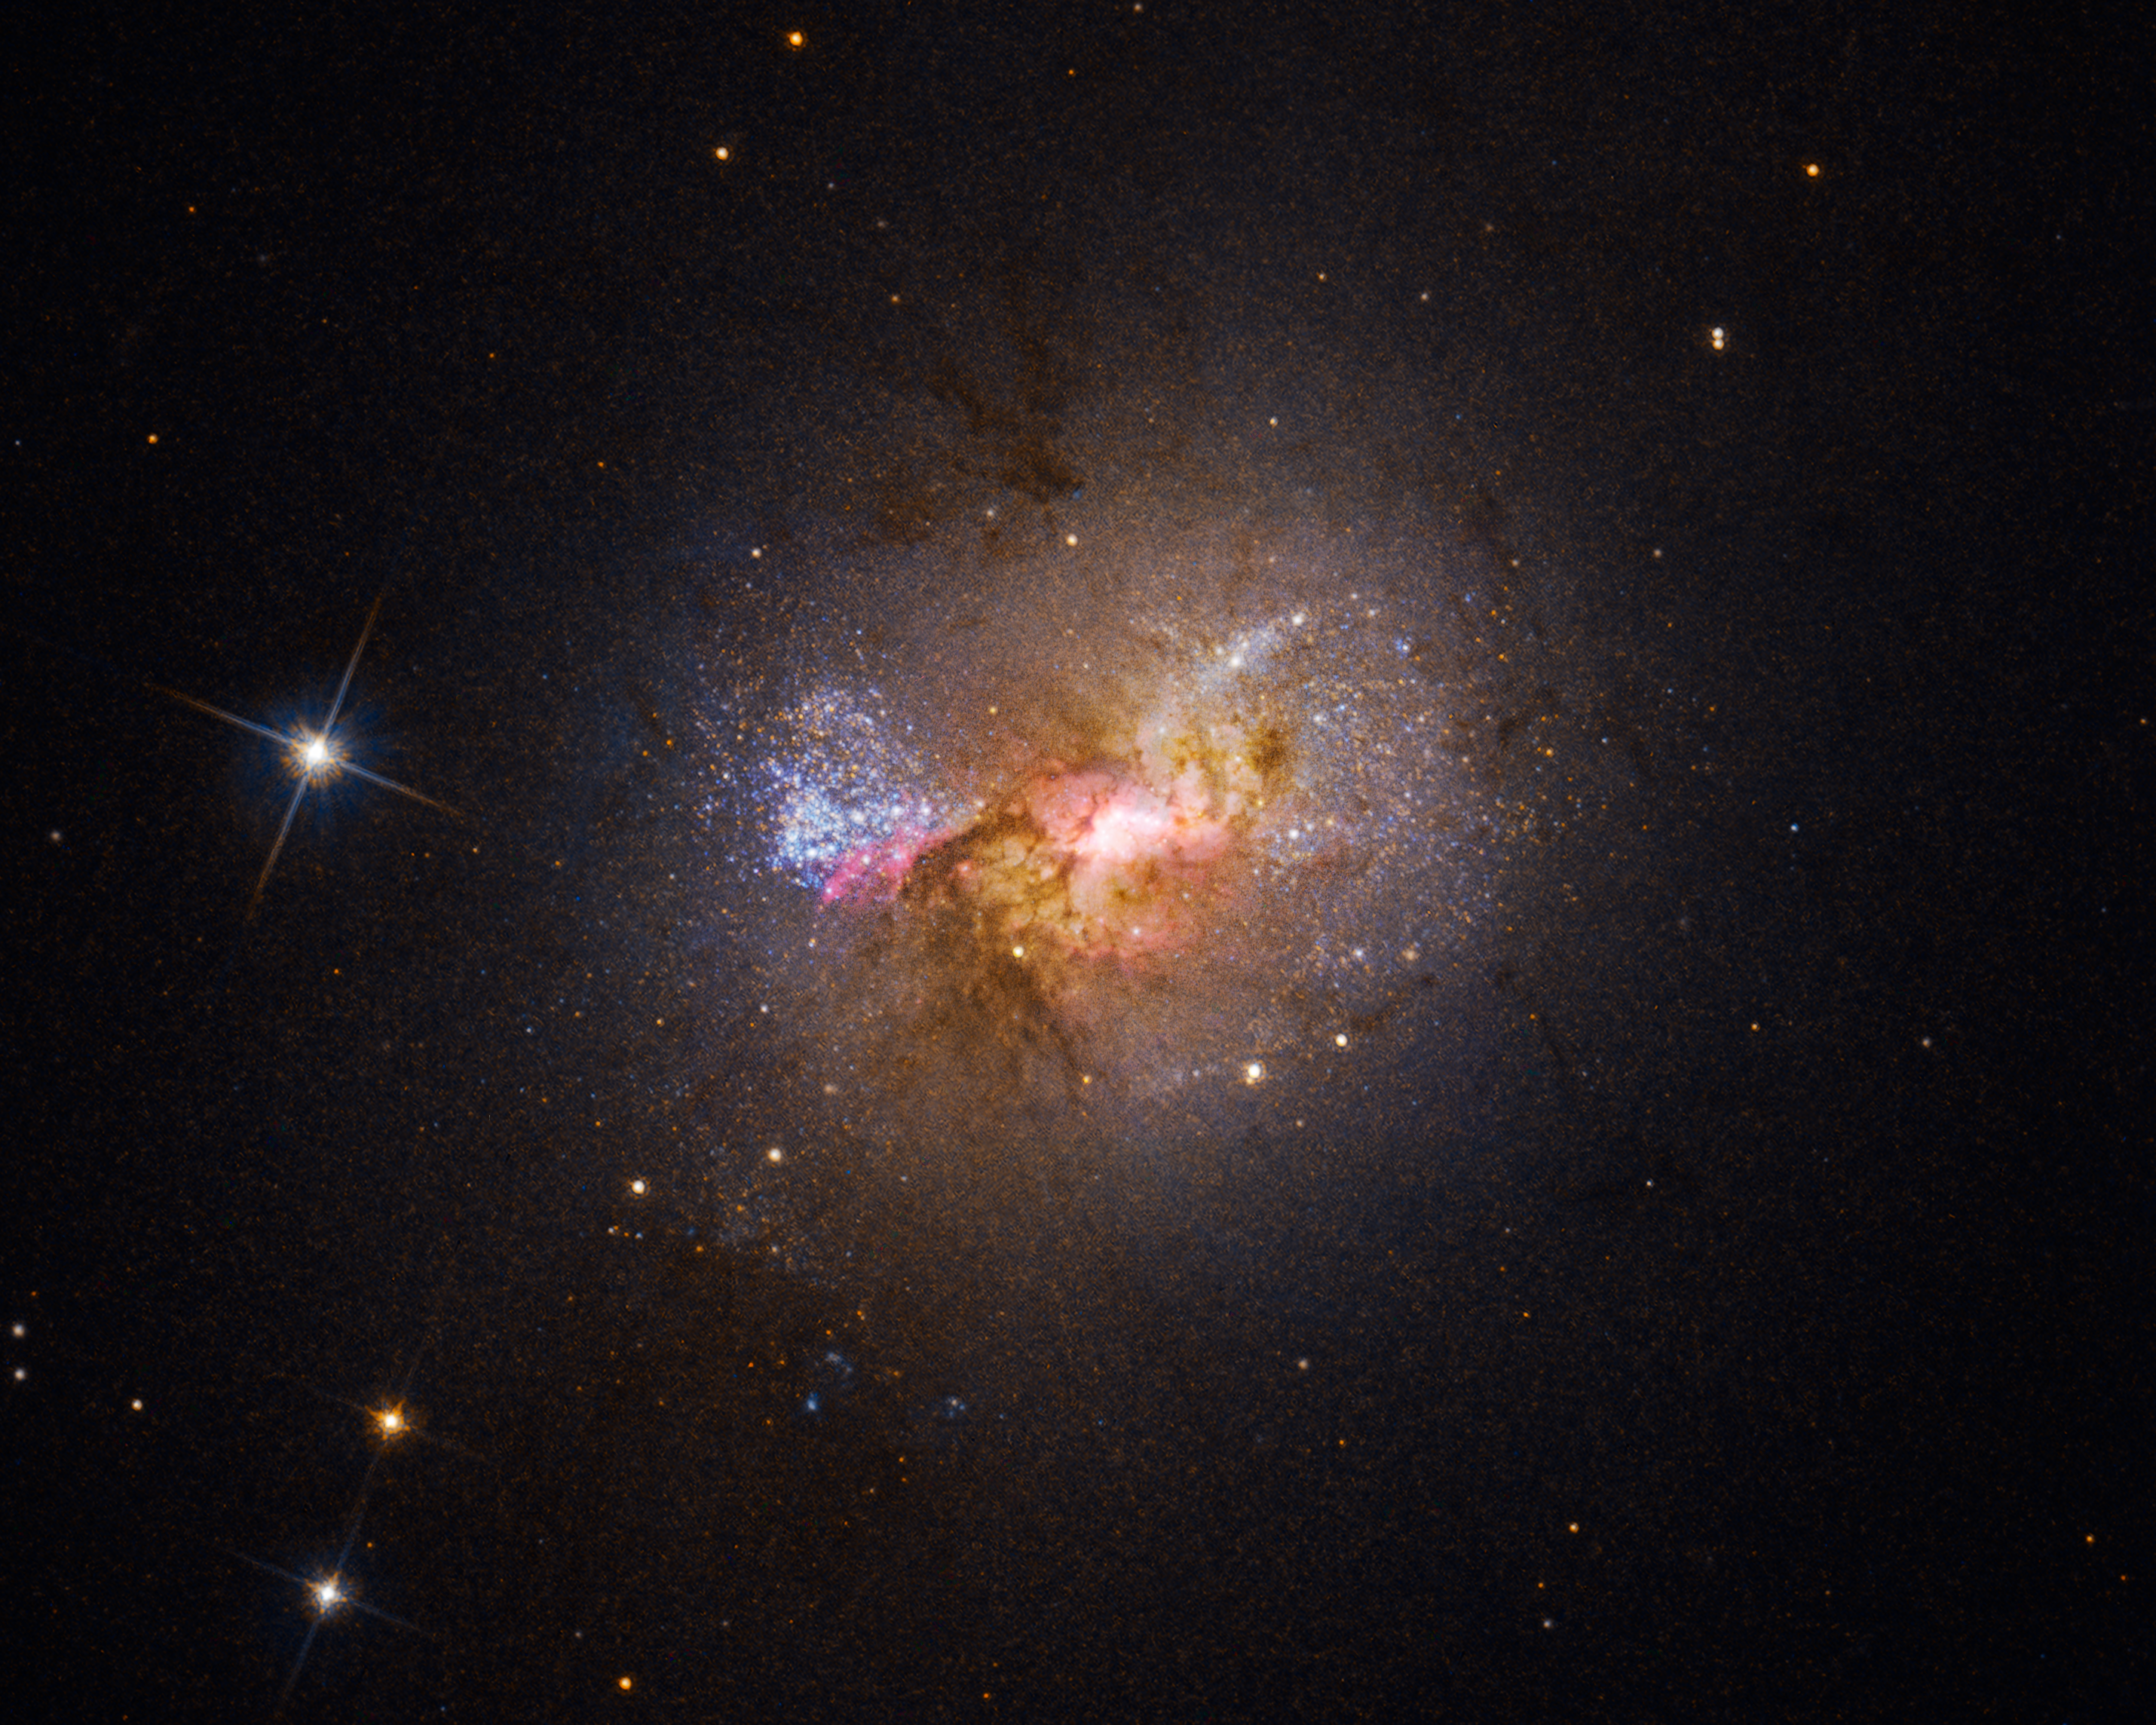

Hubble Finds a Black Hole Igniting Star Formation in a Dwarf Galaxy

Black holes are often described as the monsters of the universe—tearing apart stars, consuming anything that comes too close, and holding light captive. Detailed evidence from the NASA/ESA Hubble Space Telescope, however, shows a black hole in a new light: fostering, rather than suppressing, star formation. Hubble imaging and spectroscopy of the dwarf starburst galaxy Henize 2-10 clearly show a gas outflow stretching from the black hole to a bright star birth region like an umbilical cord, triggering the already dense cloud into forming clusters of stars. Astronomers have previously debated that a dwarf galaxy could have a black hole analogous to the supermassive black holes in larger galaxies. Further study of dwarf galaxies, which have remained small over cosmic time, may shed light on the question of how the first seeds of supermassive black holes formed and evolved over the history of the universe.

This dwarf starburst galaxy Henize 2-10 sparkles with young stars in this Hubble visible-light image. The bright region at the center, surrounded by pink clouds and dark dust lanes, indicates the location of the galaxy's massive black hole and active stellar nurseries.

Credit: NASA, ESA, Z. Schutte (XGI), A. Reines (XGI), A. Pagan (STScI)